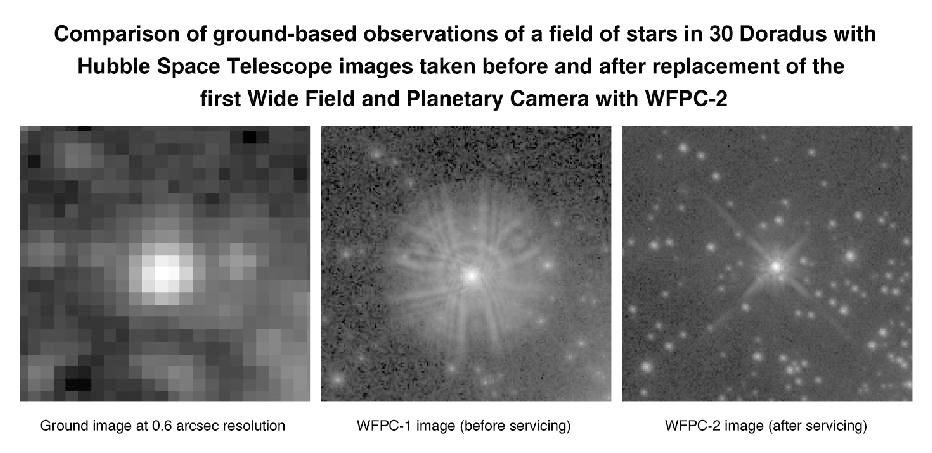

Hubble Space Telescope images of a bright star in the Large Magellanic Cloud

The three panels show images of a very bright (Wolf-Rayet) star, Melnick 34, located in the giant star-forming region called 30 Doradus in the Large Magellanic Cloud. In the background are a number of fainter stars that are comparable in brightness to our Sun.

[Left] Ground Based View

Credit: NASA & ESA